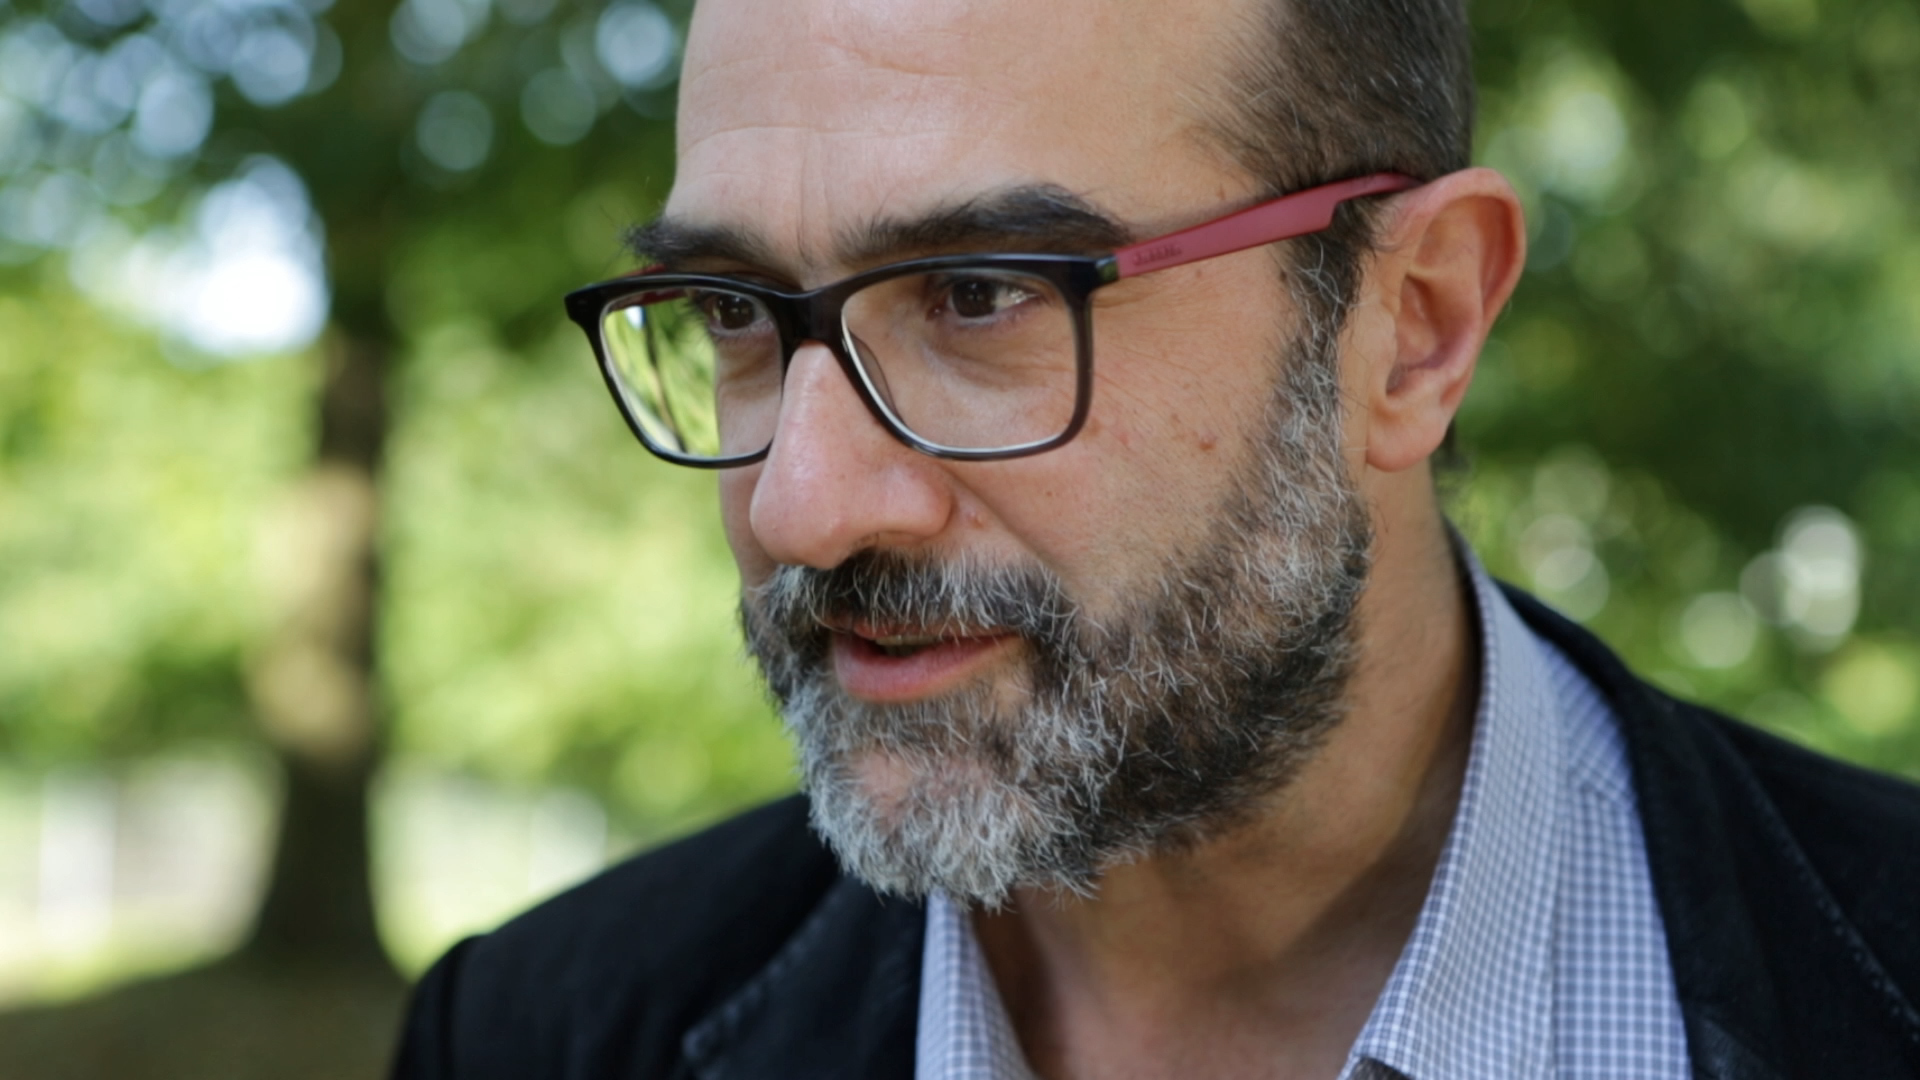

Still from Hubblecast 95: The impact of astronomy on our technological world

This is a still from Hubblecast 95. This new Hubblecast shows how many of the technologies surrounding us owe their origins, or development, to fundamental astrophysics and innovation in astronomy.

Credit: NASA & ESA